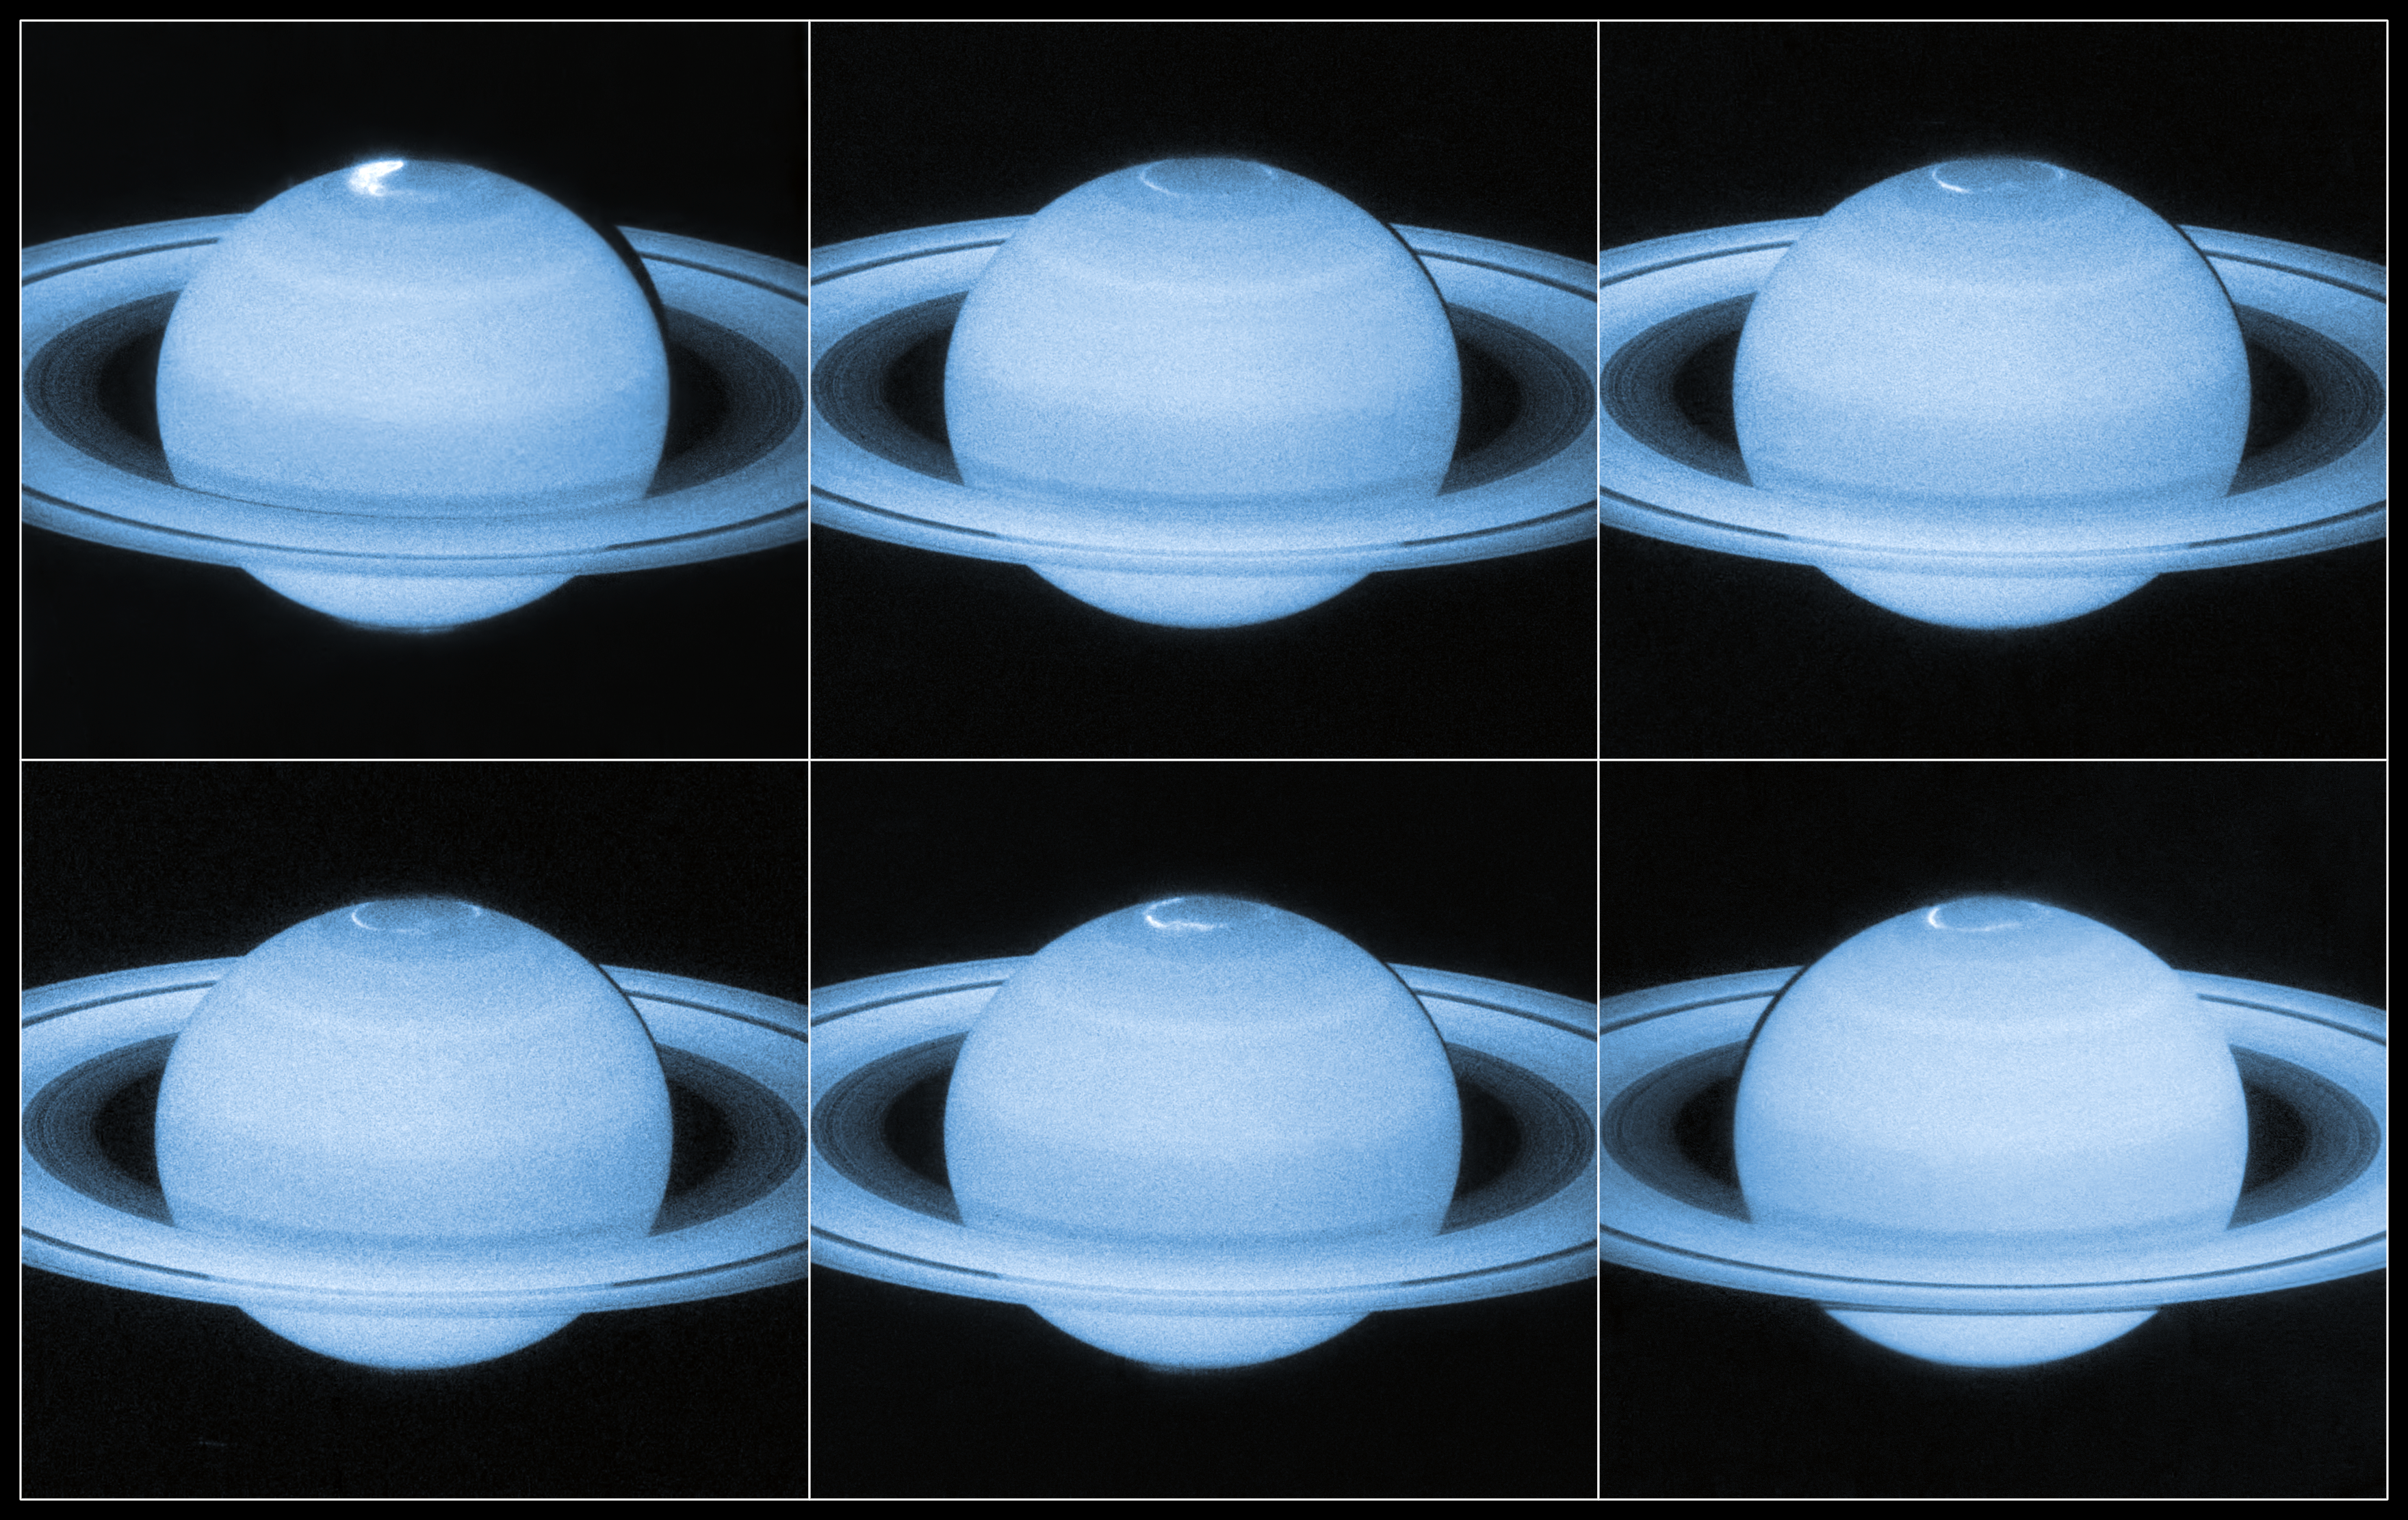

Hubble sees a flickering light display on Saturn

Astronomers using the NASA/ESA Hubble Space Telescope have captured new images of the dancing auroral lights at Saturn’s north pole. Taken from Hubble’s perspective in orbit around the Earth, these images provide a detailed look at Saturn’s stormy aurorae — revealing previously unseen dynamics in the choreography of the auroral glow.

The cause of the changing patterns in Saturn's aurorae is an ongoing mystery in planetary science. These ultraviolet images, taken by Hubble’s super-sensitive Advanced Camera for Surveys, add new insight by capturing moments when Saturn’s magnetic field is affected by bursts of particles streaming out from the Sun.

Saturn has a long, comet-like magnetic tail known as a magnetotail — as do Mercury, Jupiter, Uranus, Neptune and Earth [1]. This magnetotail is present around planets that have a magnetic field, caused by a rotating core of magnetic elements. It appears that when bursts of particles from the Sun hit Saturn, the planet’s magnetotail collapses and later reconfigures itself, an event that is reflected in the dynamics of its aurorae.

Some of the bursts of light seen shooting around Saturn’s polar regions travelled at over three times faster than the speed of the gas giant’s rotation!

The new images also formed part of a joint observing campaign between Hubble and NASA's Cassini spacecraft, which is currently in orbit around Saturn itself. Between them, the two spacecraft managed to capture a 360-degree view of the planet’s aurorae at both the north and south poles. Cassini also used optical imaging to delve into the rainbow of colours seen in Saturn’s light shows. On Earth, we see green curtains of light with flaming scarlet tops. Cassini’s imaging cameras reveal similar auroral veils on Saturn, that are red at the bottom and violet at the top.

Notes
[1] A magnetosphere is the area of space around an astronomical object in which charged particles are controlled by that object’s magnetic field. The magnetosphere is compressed on the side of the sun, and on the other side it extends far beyond the object. It is this extended region of the magnetosphere that is known as the magnetotail.

Credit: NASA, ESA Acknowledgement: J. Nichols (University of Leicester)